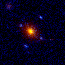

Gravitational Lenses

A gravitational lens is produced by the enormous gravitational field of a massive object which bends light to magnify, brighten and distort the image of a more distant object. Depending on the alignment between the objects and the mass distribution of the foreground lens, the more distant object can be smeared into arcs or split into pairs, triples, or even quadruple images.

Credit: Kavan Ratnatunga (Johns Hopkins University, Baltimore, MD)